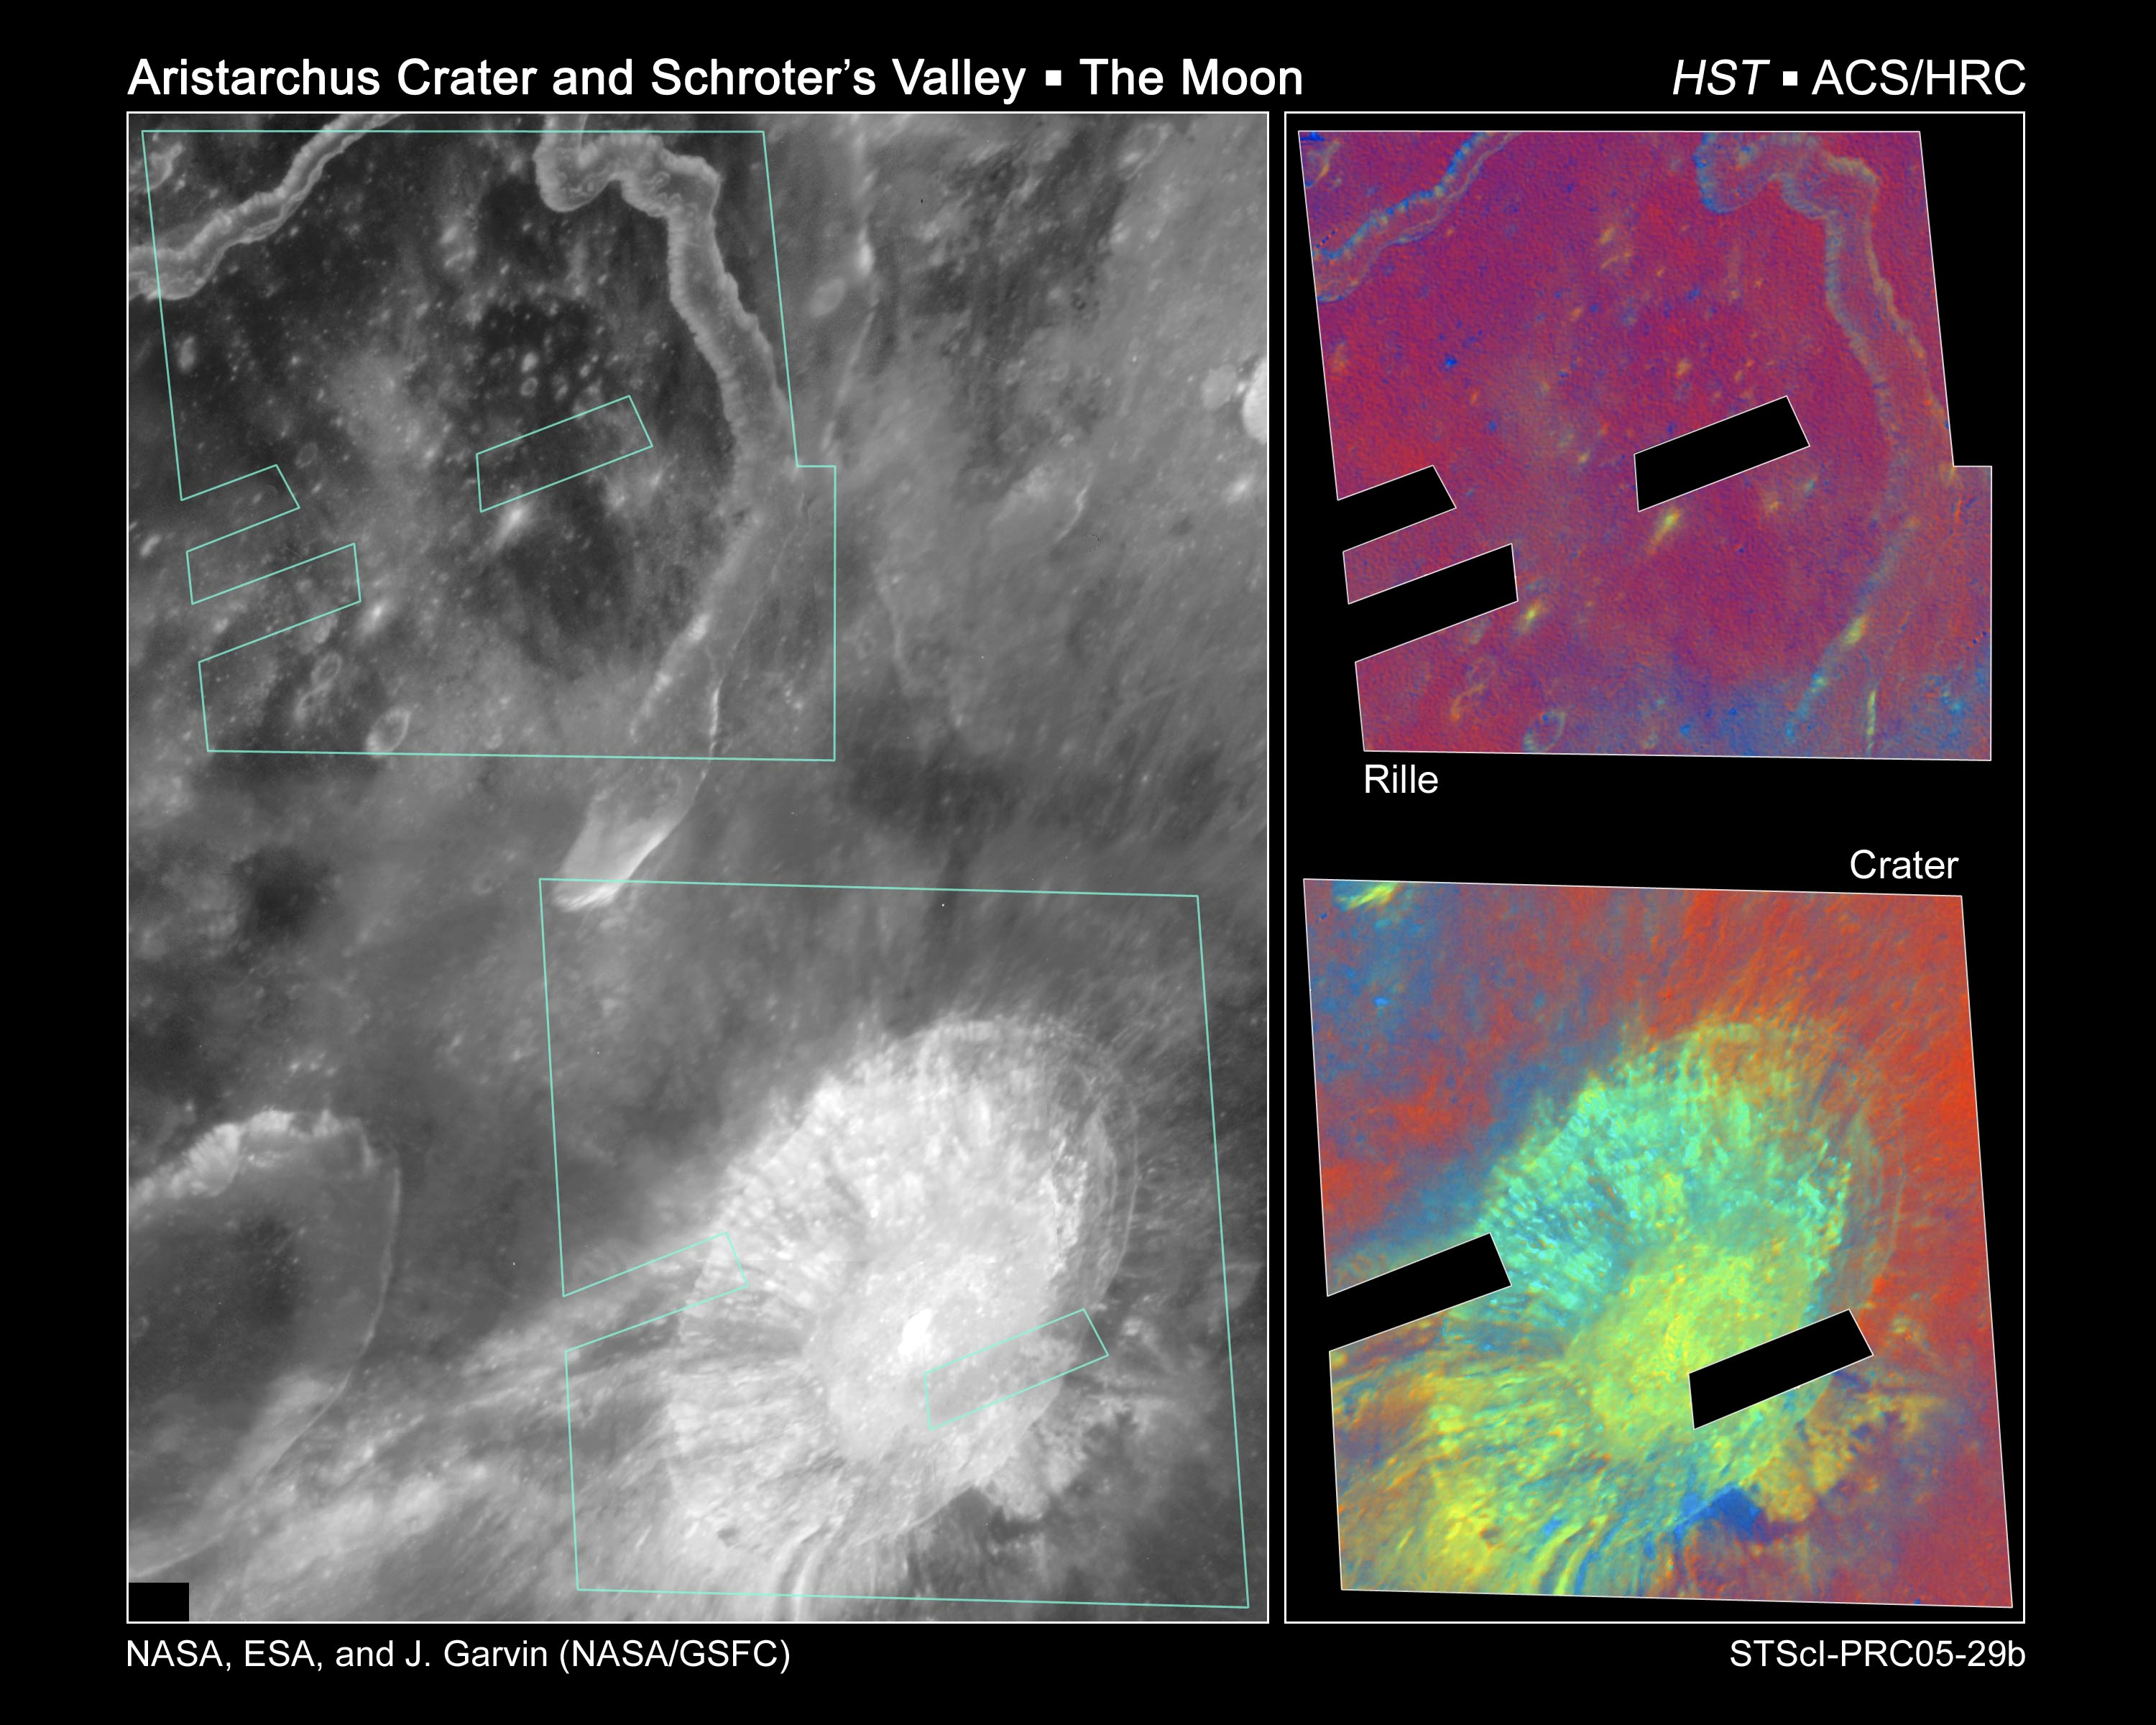

Hubble reveals potential titanium oxide deposits at Aristarchus and Schroter's Valley Rille

This view of the lunar impact crater Aristarchus and adjacent features (Herodotus crater, Schroter's Valley rille) illustrates the ultraviolet and visible wavelength characteristics of this geologically diverse region of the Moon. The two inset images illustrate one preliminary approach for isolating differences due to such effects as composition, soil maturity, mixing, and impact ejecta emplacement. The colour composite in the lower right focuses on the 26-mile-diameter (42-kilometer-diameter) Aristarchus impact crater, and employs ultraviolet- to visible-color-ratio information to accentuate differences that are potentially diagnostic of ilmenite- (i.e, titanium oxide) bearing materials as well as pyroclastic glasses.

Credit: NASA, ESA and J. Garvin (NASA/GSFC)